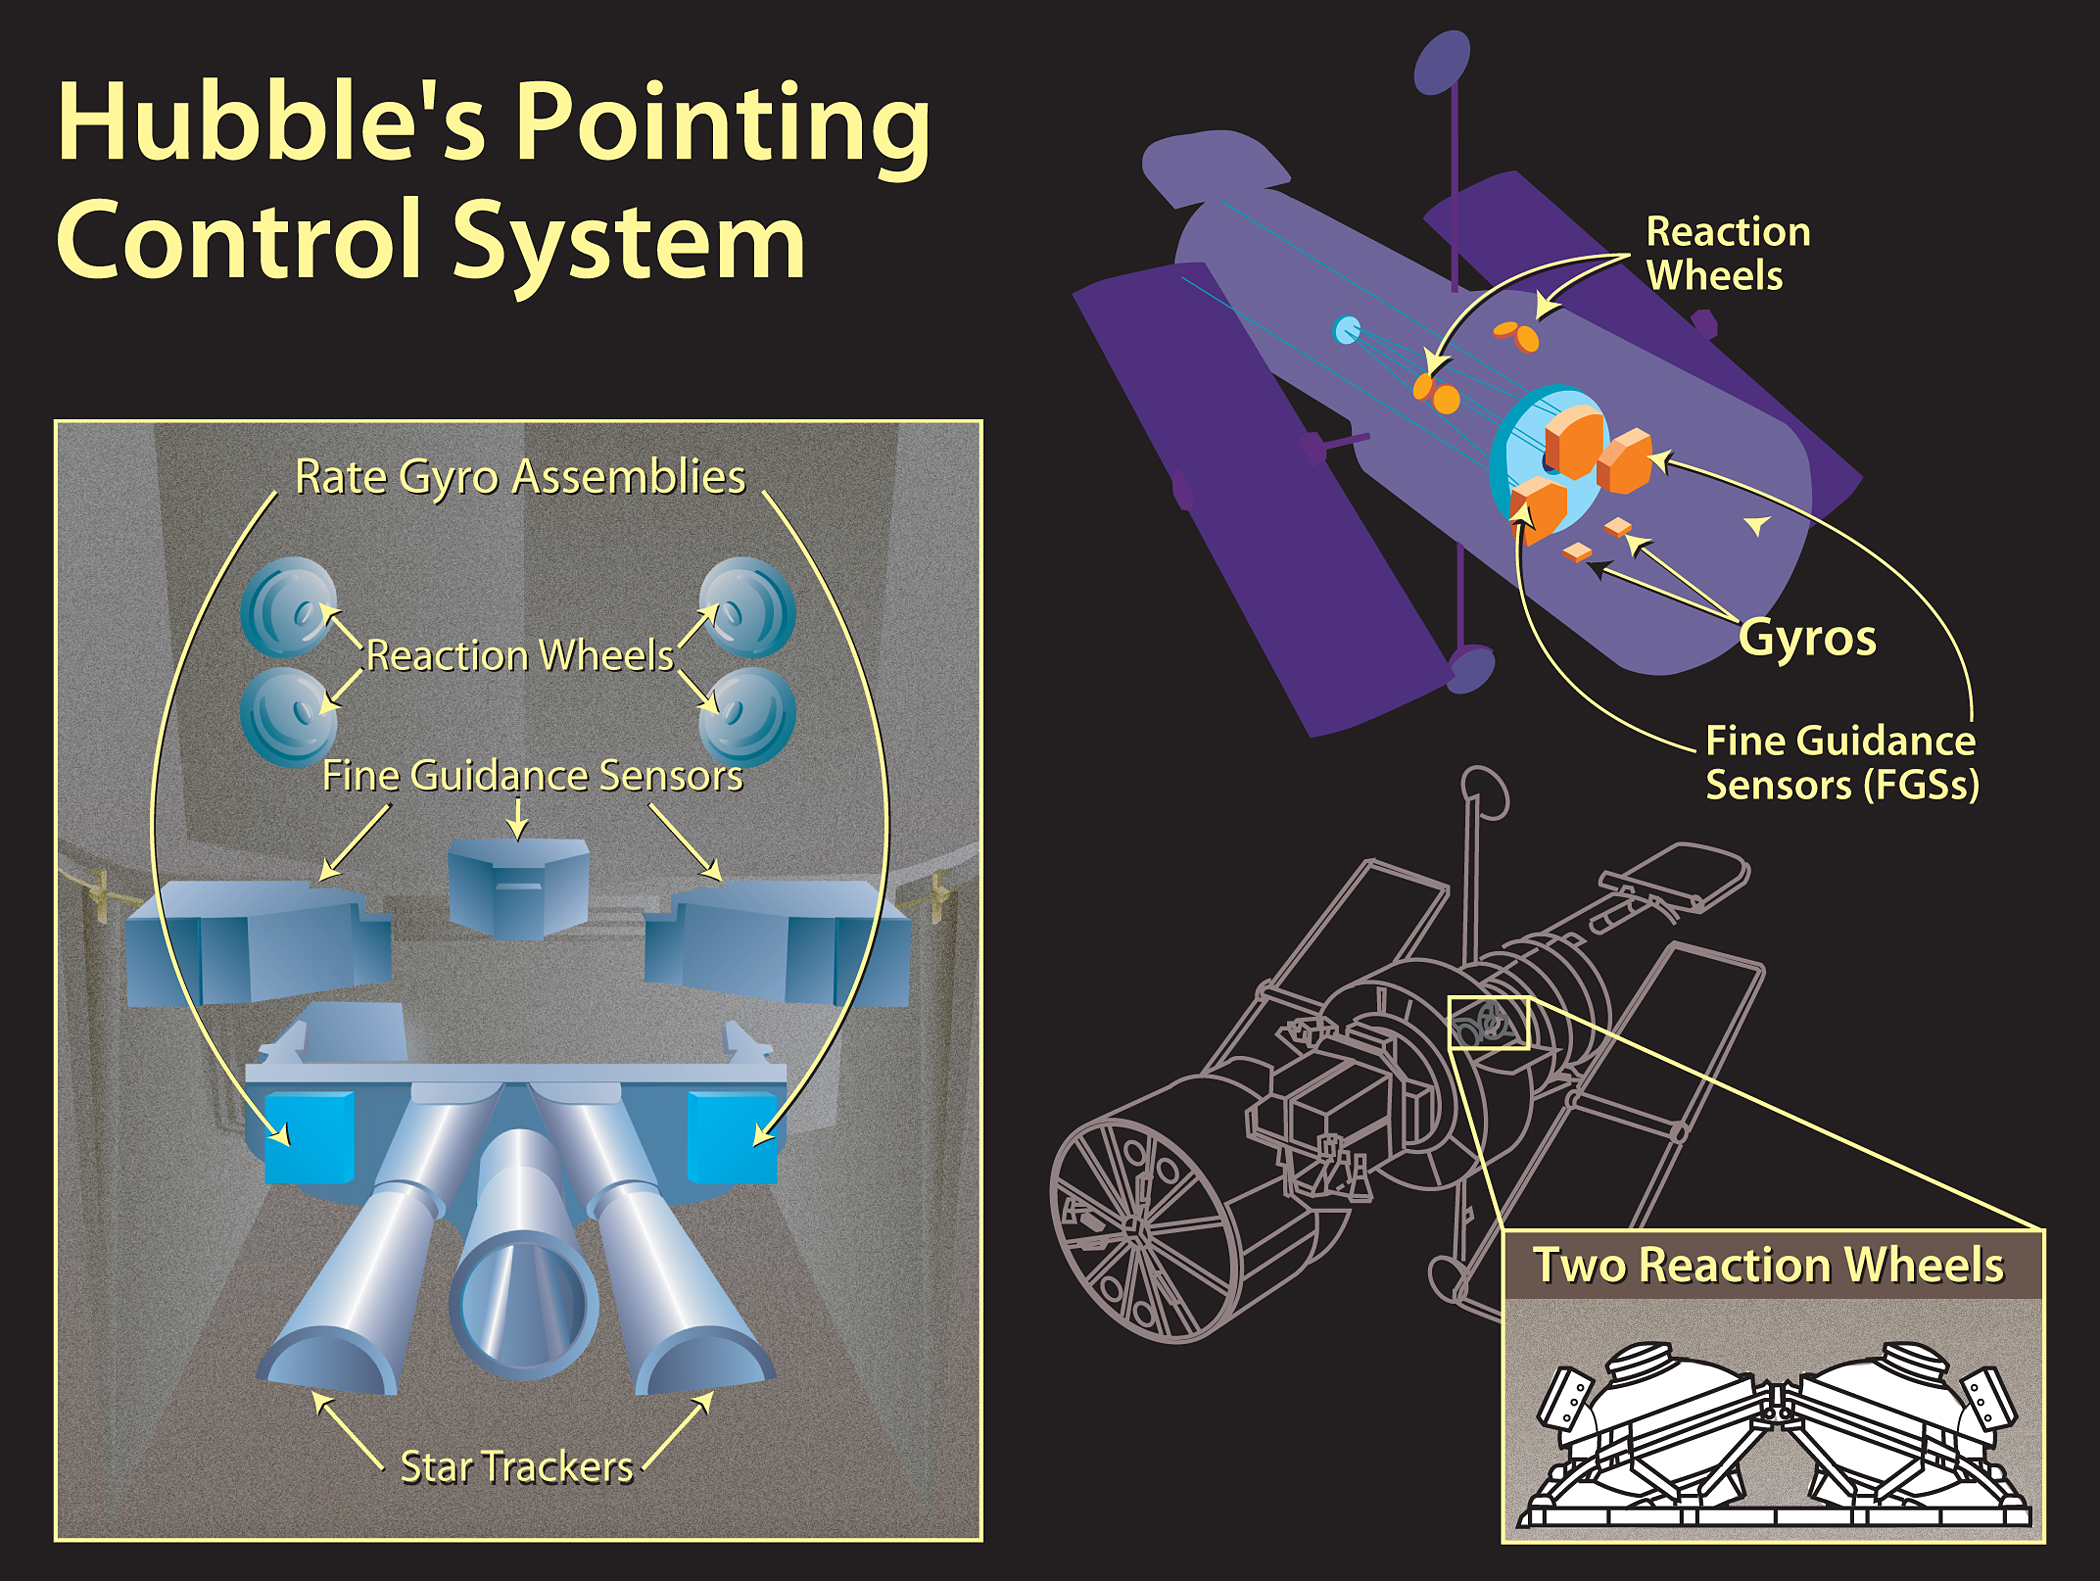

HST pointing control system diagram

Hubble uses some very basic physics to turn itself around and look at different parts of the sky. Located on the telescope are six Gyroscopes (which, like a compass, always point in the same direction) and four free-spinning steering devices called reaction wheels.

Credit: NASA, ESA, A. Feild and K. Cordes (STScI), and Lockheed Martin